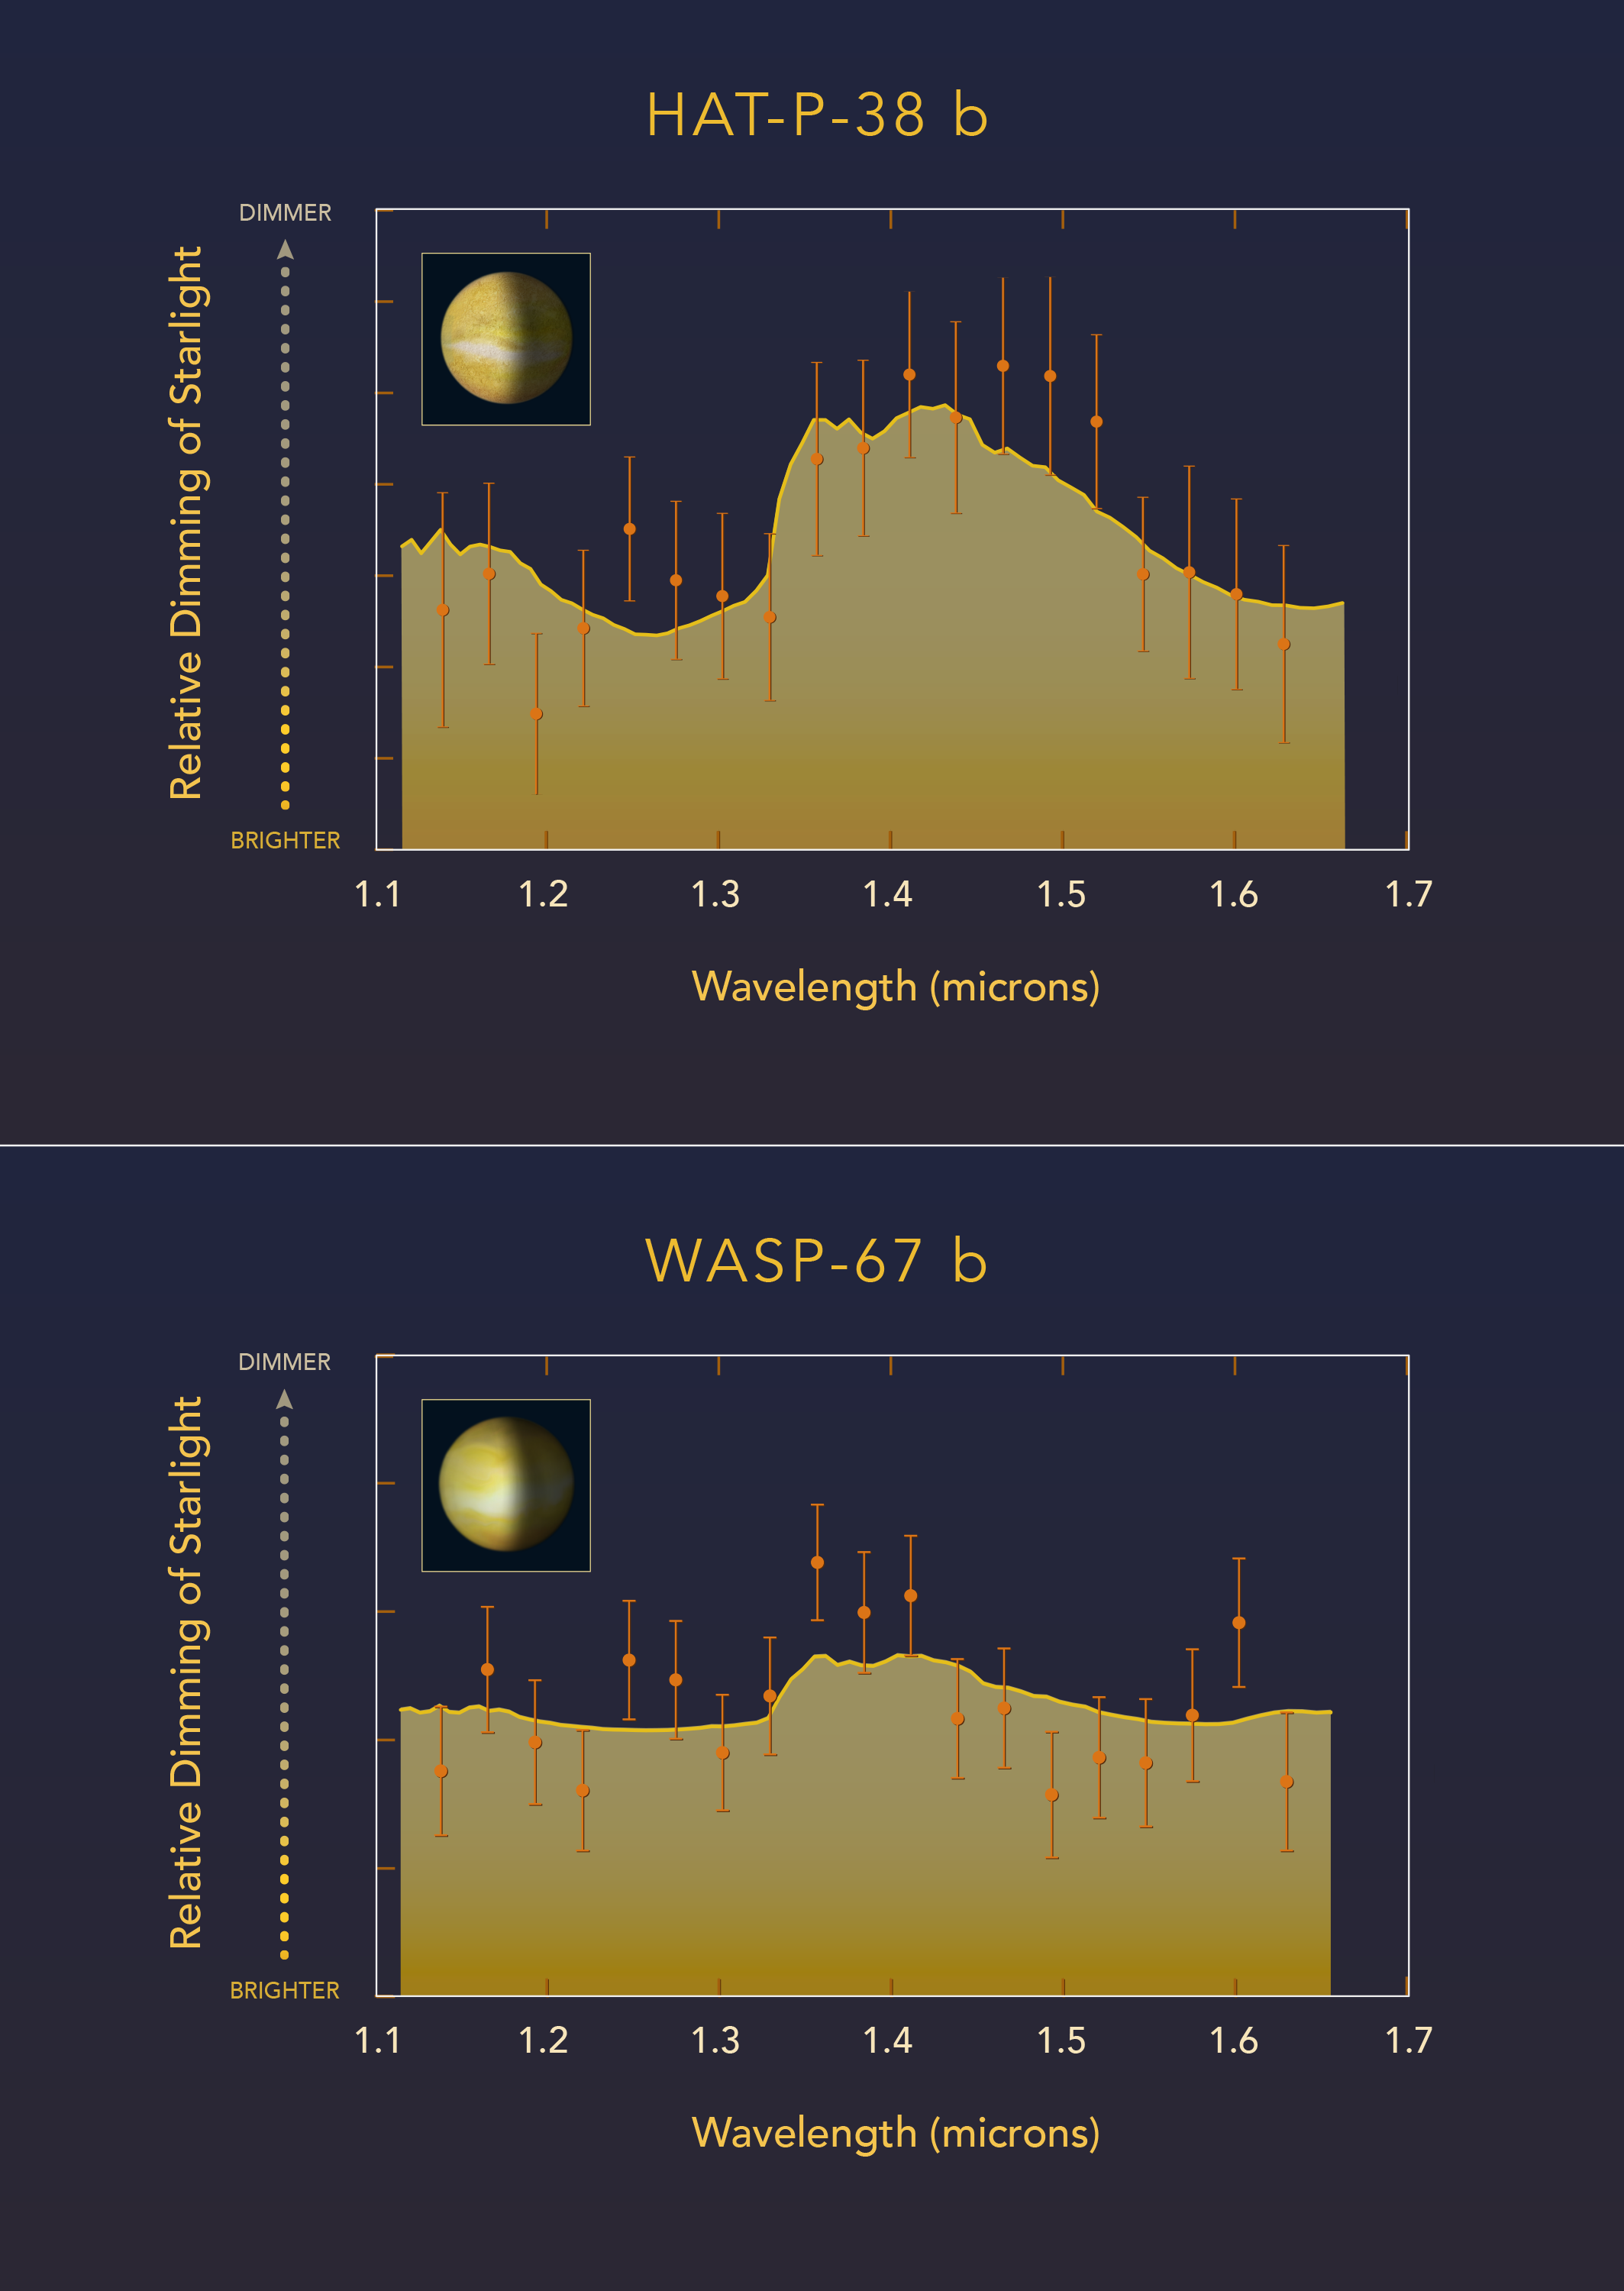

Cloudy versus clear atmospheres on exoplanets WASP-67 b and HAT-P-38 b

This diagram compares observations made with the NASA/ESA Hubble Space Telescope of two "hot Jupiter"-class planets orbiting very closely to different sunlike stars. Astronomers measured how light from each parent star is filtered through each planet's atmosphere. Hubble near-infrared observations were used to measure the spectral fingerprint caused by the presence of water vapor in the atmosphere. The exoplanet HAT-P-38 b does show a water signature — indicated by the absorption-feature peak in the spectrum. This is interpreted as indicating the upper atmosphere is free of clouds or hazes. By contrast, a very similar hot Jupiter, WASP-67 b, has a flat spectrum that lacks any water-absorption feature. This suggests that most of the planet's atmosphere is masked by high-altitude clouds.

These results are not peer-reviewed and were presented at the 230th meeting of the AAS.

Credit: NASA, ESA, and Z. Levy (STScI)